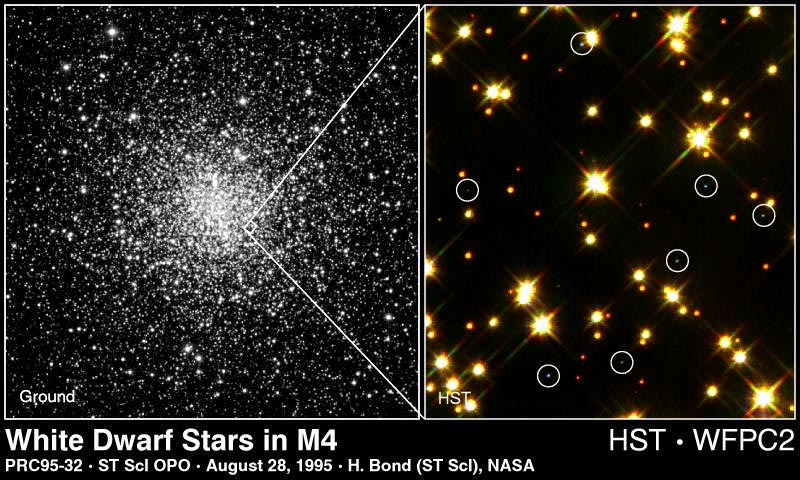

White Dwarf Stars in M4

Right Image

A view of globular cluster M4 (fourth object in the Messier catalog of star clusters and nebulae). The nearest globular cluster to Earth (7, 000 light-years away), and containing more than 100, 000 stars, M4 was the target of a Hubble Space Telescope search for white dwarf stars.

The box (right of center) shows the small area that Hubble telescope probed.

Credit: M. Bolte (University of California, Santa Cruz) and Kitt Peak National Observatory 0.9-meter telescope

Left Image

A Hubble Space Telescope colour image of a small portion of the cluster only 0.63 light-years across reveals eight white dwarf stars among the cluster's much brighter population of yellow sun-like stars and cooler red dwarf stars.

Hubble reveals a total of 75 white dwarfs in one small area within M4, out of the total of about 40, 000 white dwarfs that the cluster is predicted to contain.

Credit: Harvey Richer (University of British Columbia, Vancouver, Canada) and NASA

Credit: Harvey Richer (University of British Columbia, Vancouver, Canada), M. Bolte (University of California, Santa Cruz) and NASA/ESA